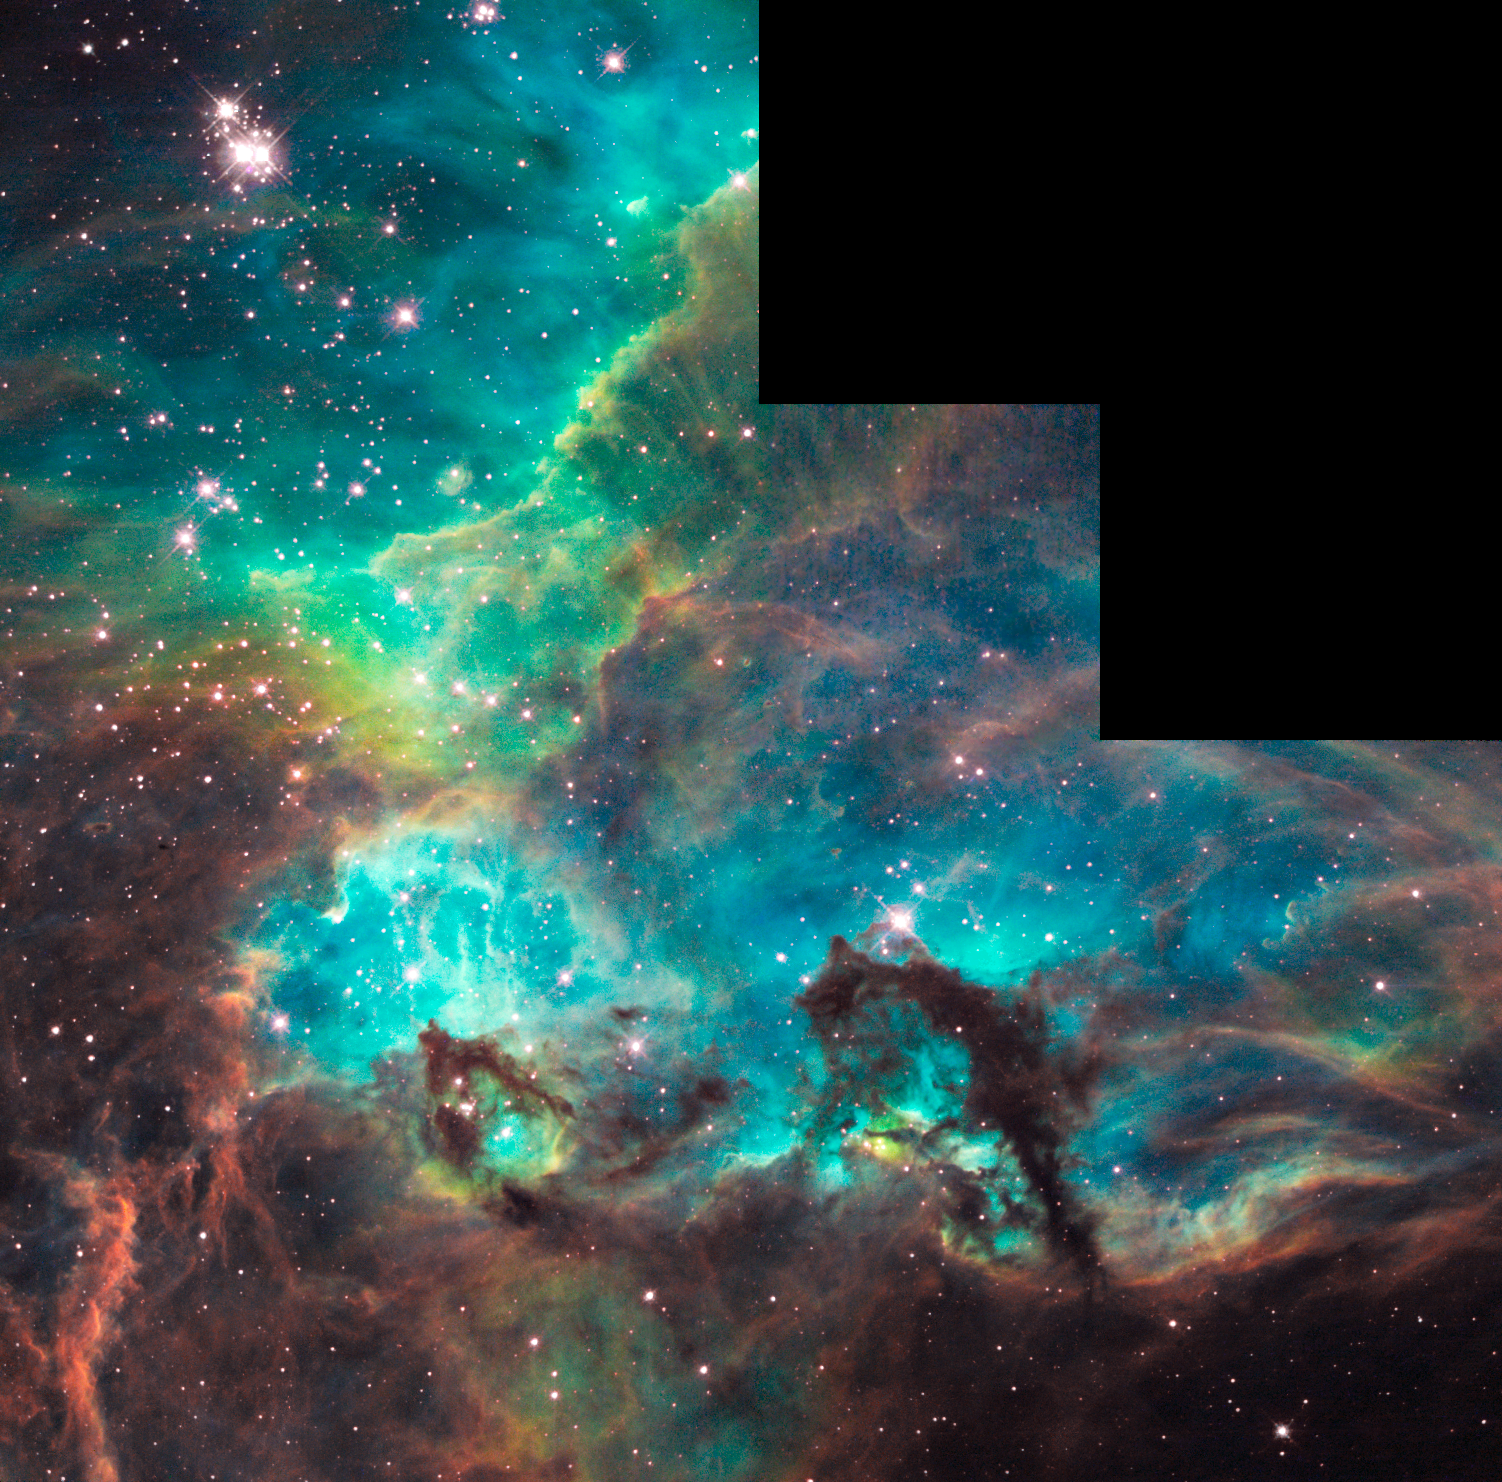

NGC 2074 imaged by Hubble on 100 000th orbit milestone

In commemoration of the NASA/ESA Hubble Space Telescope completing its 100 000th orbit around the Earth in its 18th year of exploration and discovery, scientists have aimed Hubble to take a snapshot of a dazzling region of celestial birth and renewal. Hubble peered into a small portion of the nebula near the star cluster NGC 2074 (upper, left). The region is a firestorm of raw stellar creation, perhaps triggered by a nearby supernova explosion. It lies about 170 000 light-years away near the Tarantula nebula, one of the most active star-forming regions in our Local Group of galaxies. This representative colour image was taken on 10 August, 2008, with Hubble's Wide Field Planetary Camera 2. Red shows emission from sulphur atoms, green from glowing hydrogen, and blue from glowing oxygen.

Credit: NASA, ESA and M. Livio (STScI)